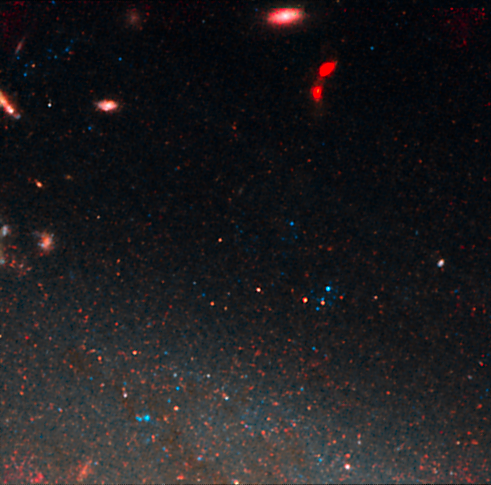

NGC 3021 NICMOS/ACS detail 4

This image is part of a montage of images of the spiral galaxy NGC 3021 taken by the NASA/ESA Hubble Space Telescope. Hubble made precise measurements of Cepheid variable stars in the galaxy, highlighted in this image. These stars pulsate at a rate that is matched closely to their intrinsic brightness. This makes them ideal for measuring intergalactic distances. The Cepheids are used to calibrate an even brighter milepost marker that can be used over greater distances, a Type Ia supernova. The supernova was observed in the galaxy in 1995. The image was taken with the Near Infrared Camera and Multi-Object Spectrometer (NICMOS).

Credit: NASA, ESA and A. Riess (STScI/JHU)